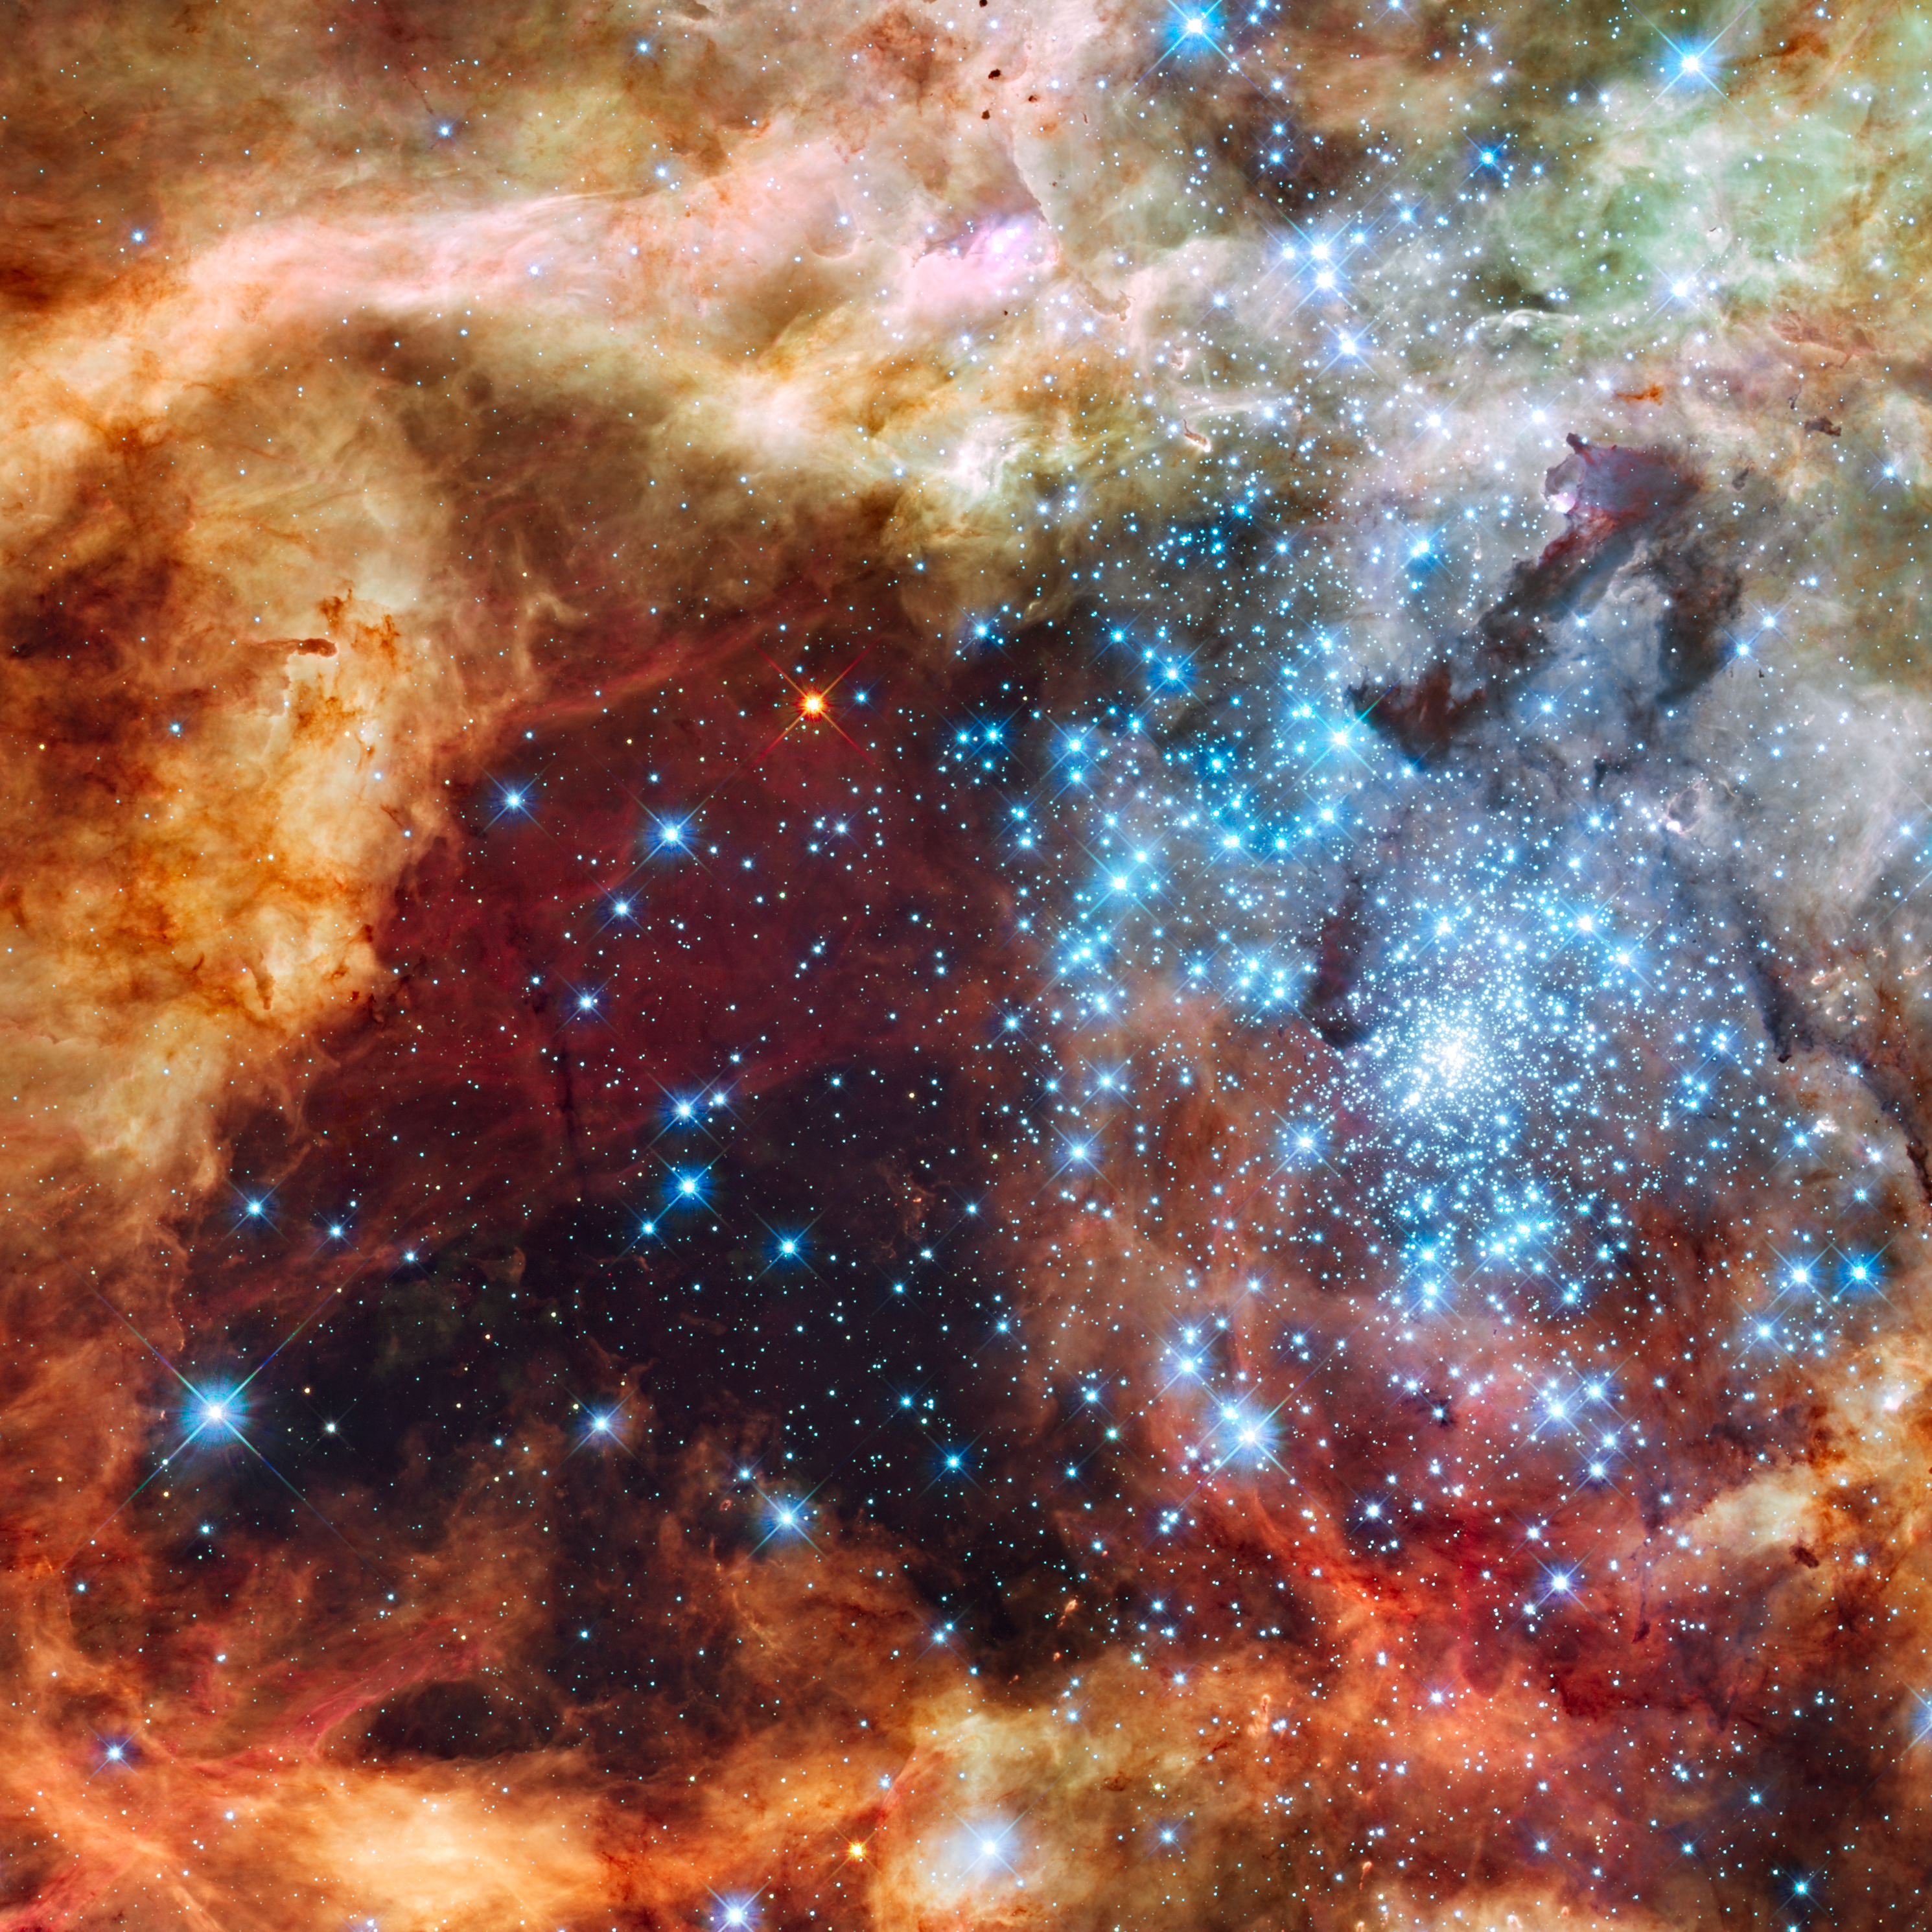

30 Doradus in Ultraviolet, Visible, and Red Light

This image of hundreds of brilliant blue stars wreathed by warm glowing clouds is the most detailed view of the largest stellar nursery in our local galactic neighborhood. The stellar grouping, called R136, is only a few million years old and resides in the 30 Doradus Nebula, a turbulent star-birth region in the Large Magellanic Cloud (LMC), a satellite galaxy of our Milky Way. There is no known star-forming region in our galaxy as large or as prolific as 30 Doradus. Many of the diamond-like icy blue stars are among the most massive stars known. Several of them are over 100 times more massive than our Sun.

The image, taken in ultraviolet, visible, and red light by Hubble's Wide Field Camera 3, spans about 100 light-years. The nebula is close enough to Earth that Hubble can resolve individual stars, giving astronomers important information about the birth and evolution of stars in the universe.

Credit: NASA, ESA, F. Paresce (INAF-IASF, Bologna, Italy), R. O'Connell (University of Virginia, Charlottesville), and the Wide Field Camera 3 Science Oversight Committee